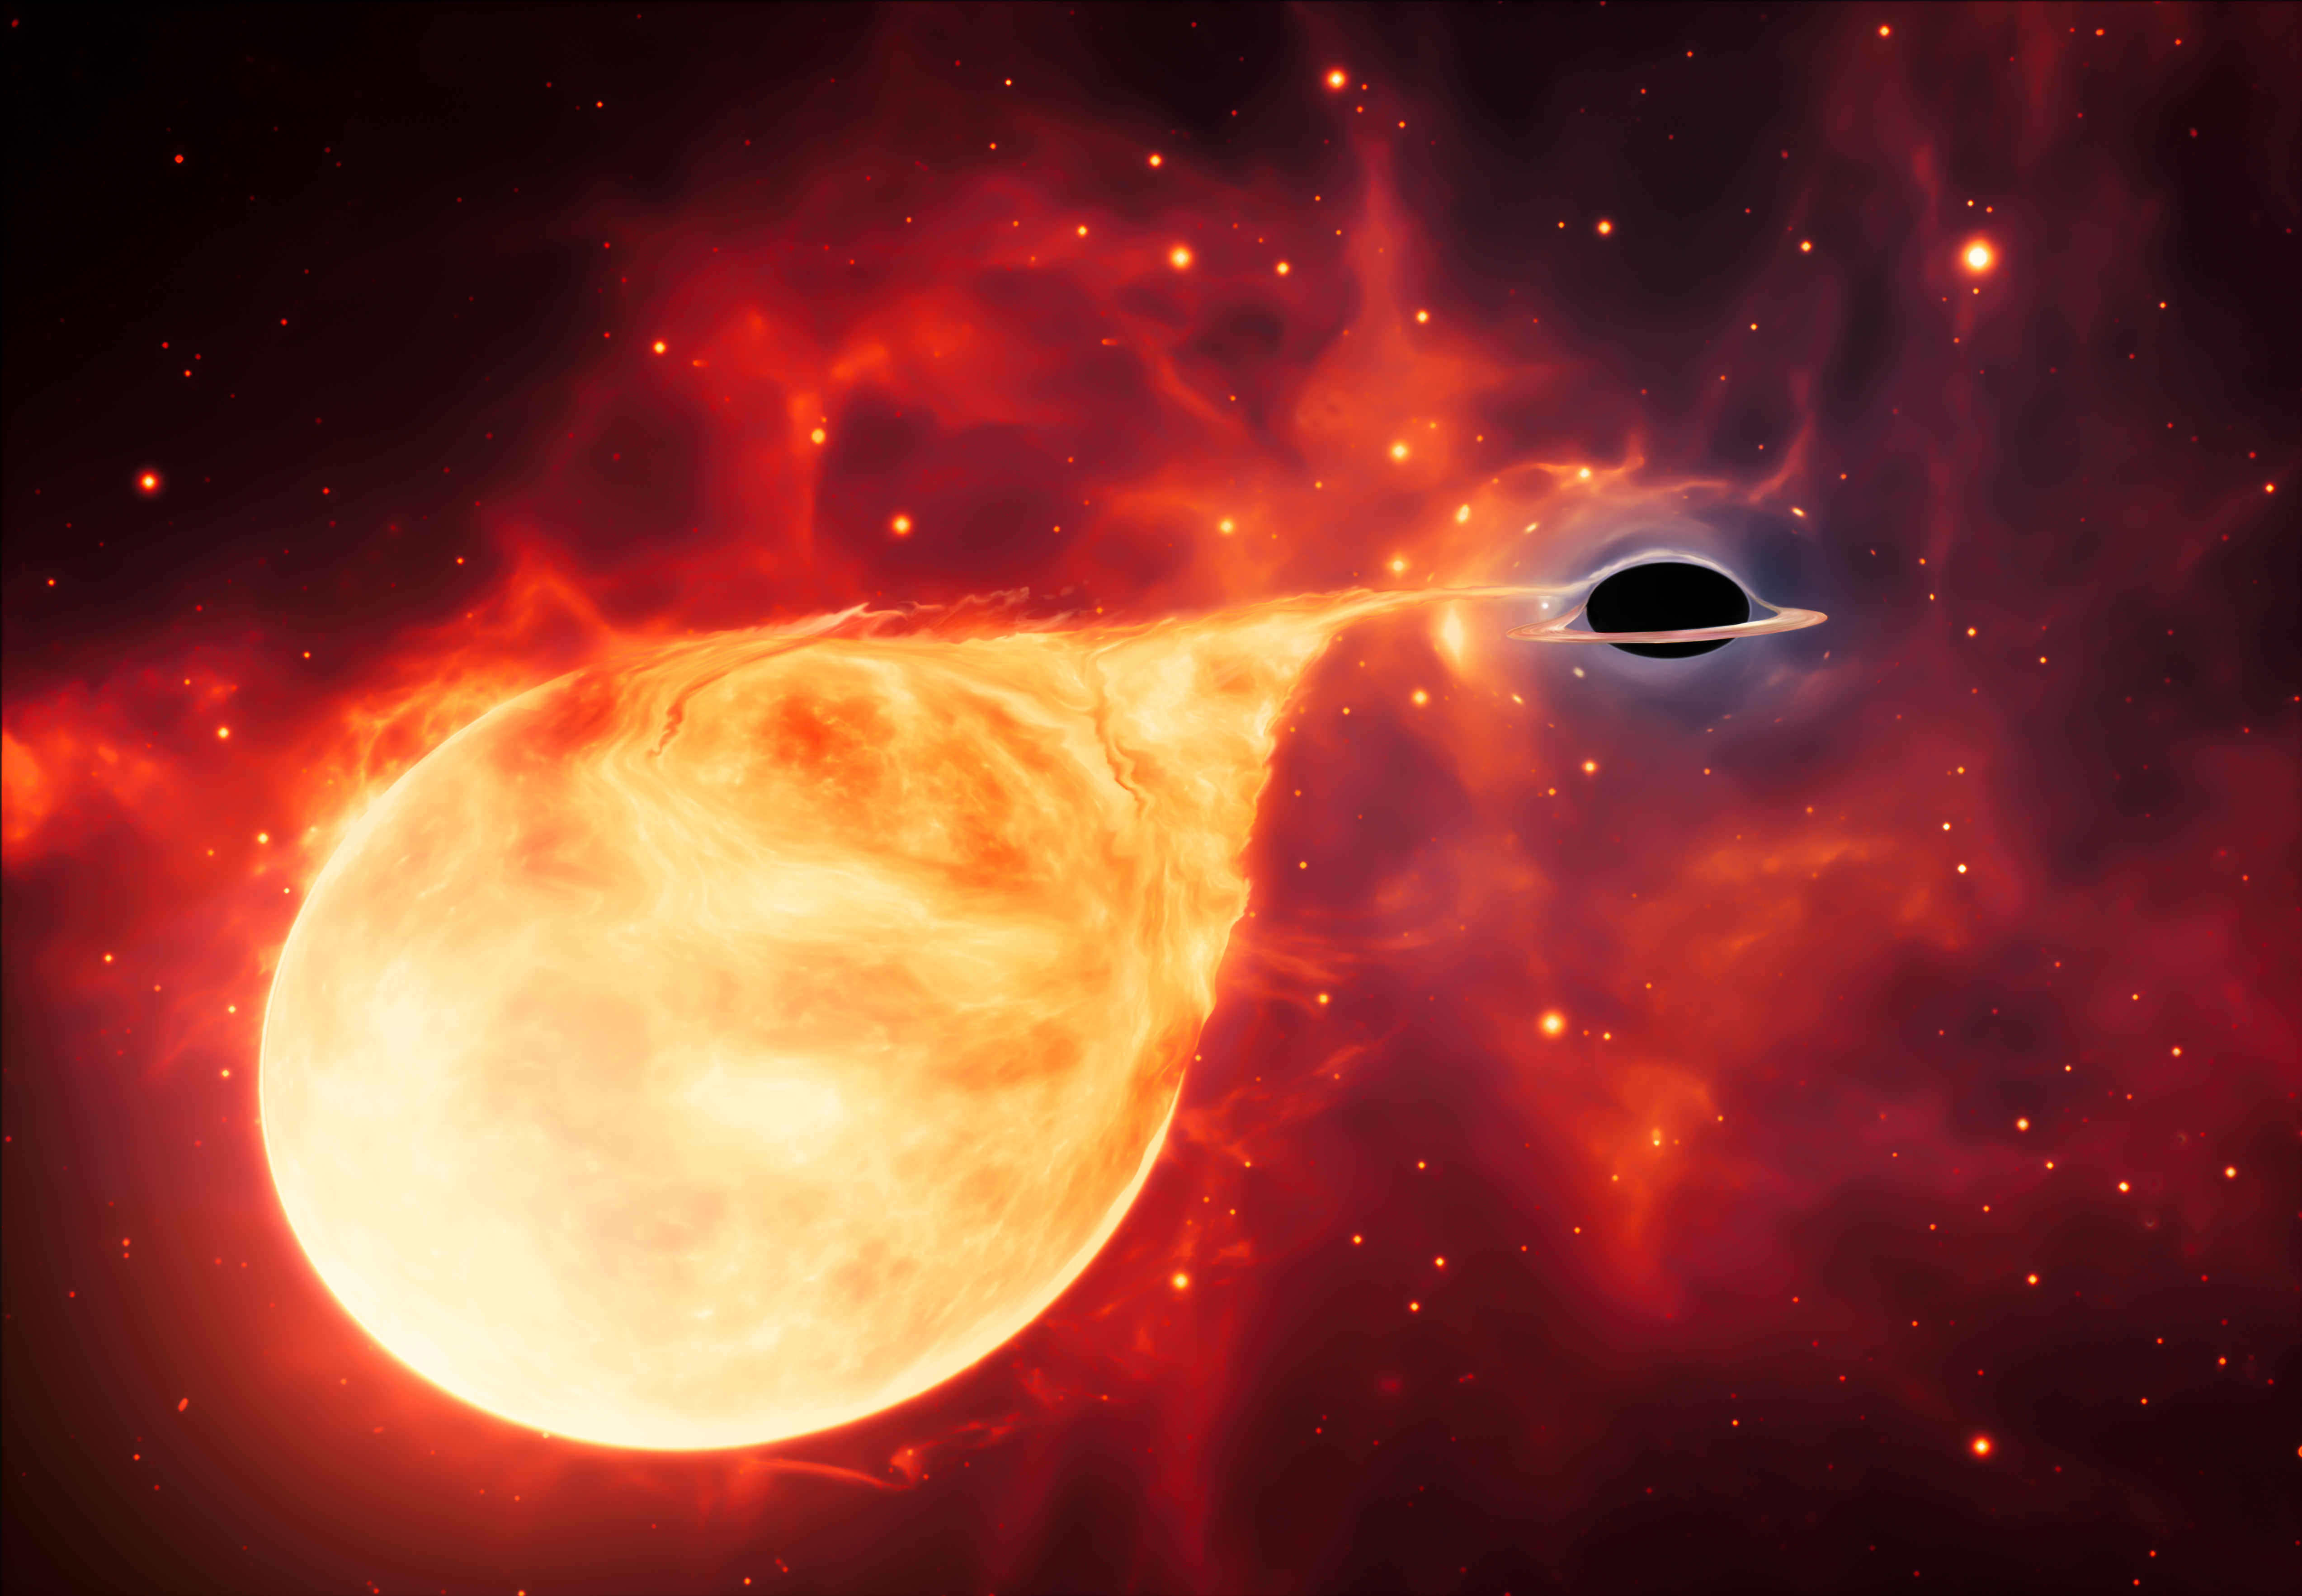

Intermediate-Mass Black Hole with Torn-Apart Star (Artist’s Impression)

This artist’s impression depicts a star being torn apart by an intermediate-mass black hole (IMBH), surrounded by an accretion disc. This thin, rotating disc of material consists of the leftovers of a star which was ripped apart by the tidal forces of the black hole.

Credit: ESA/Hubble, M. Kornmesser